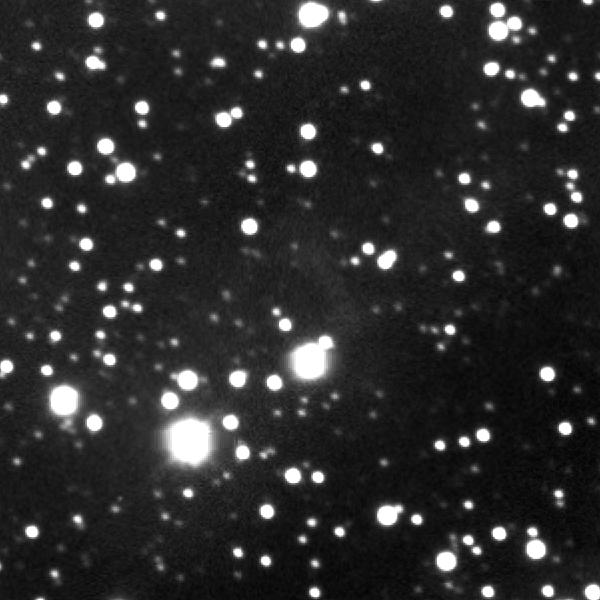

Eta Carinae light echo region — 10 March 2003

The double-star system Eta Carinae, about 120 times more massive than the Sun, produced a spectacular outburst that was seen on Earth from 1837 to 1858. This image shows an area near Eta Carinae that is not illuminated by the double-star system's outburst. The image was taken in March 2003 with the NOAO Optical Astronomy Observatory's Blanco 4-metre telescope at Cerro Tololo Inter-American Observatory in Chile.

Credit: NOAO, AURA, NSF, and N. Smith (University of Arizona)